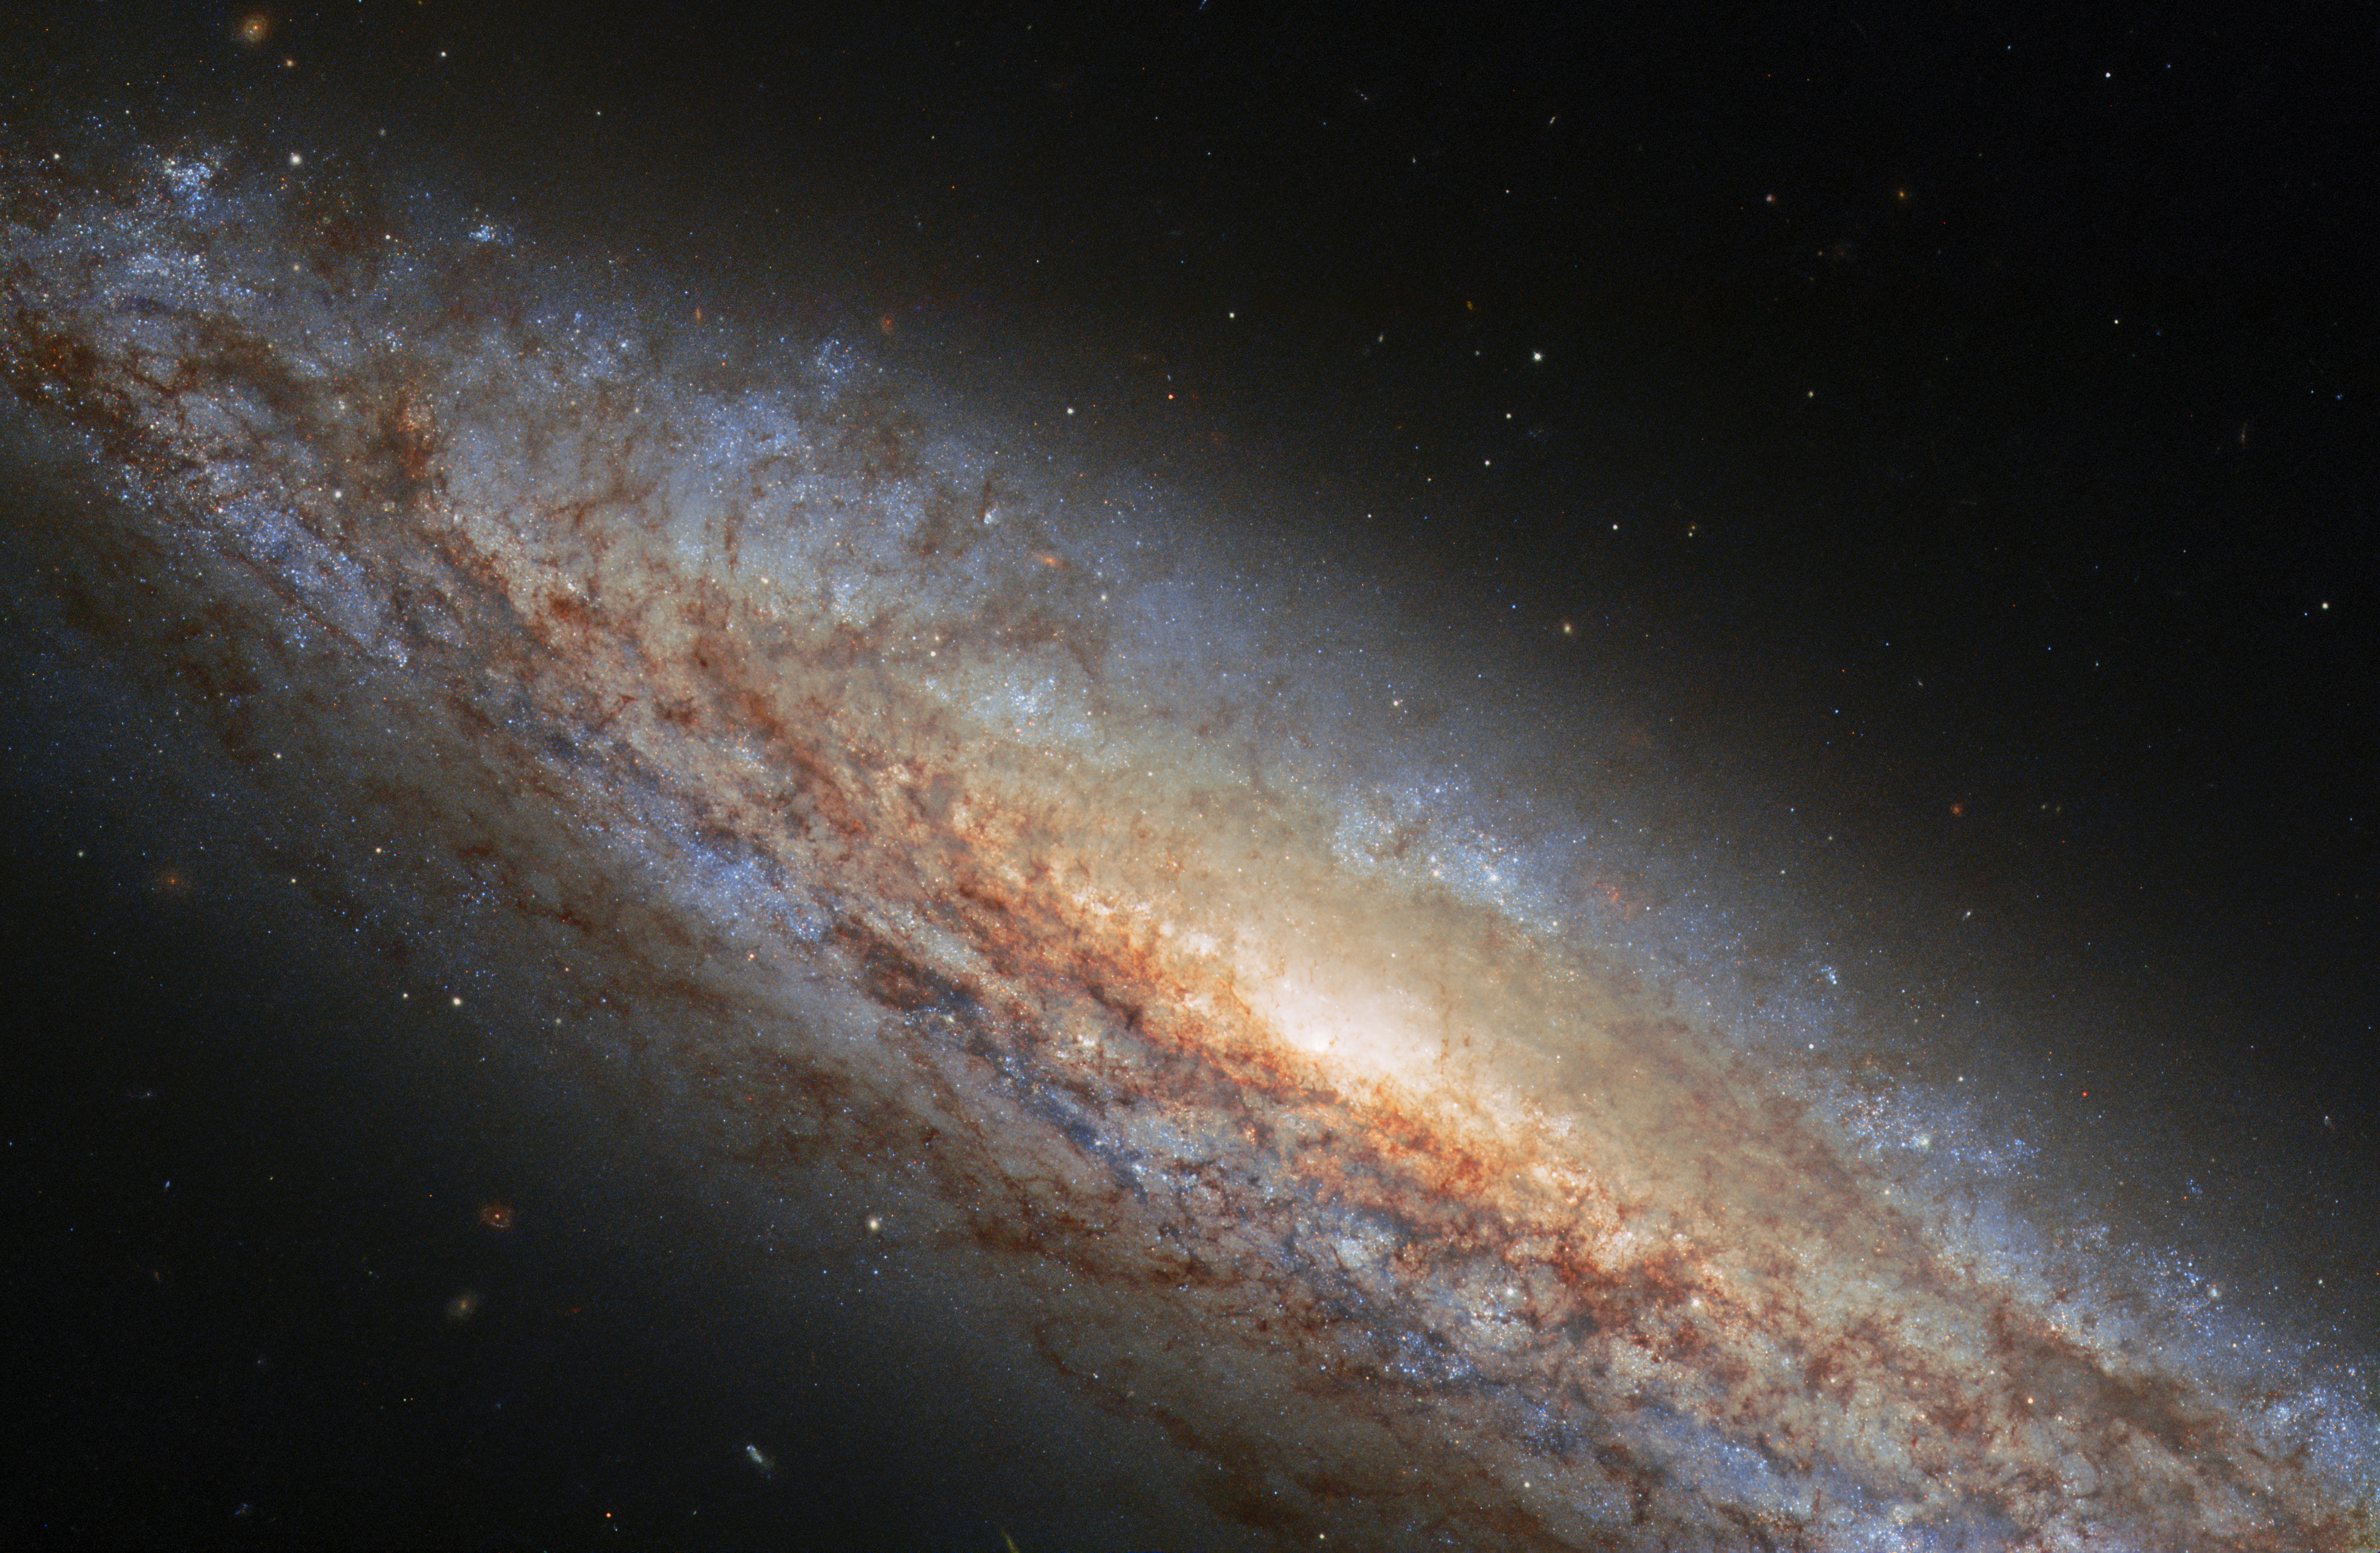

Invisible Galactic Gale

NGC 4666 takes centre stage in this image from the NASA/ESA Hubble Space Telescope. This majestic spiral galaxy lies about 80 million light-years away in the constellation Virgo, and is undergoing a particularly intense episode of star formation. Astronomers refer to galaxies which are forming stars anomalously quickly as starburst galaxies. NGC 4666’s starburst is thought to be due to gravitational interactions with its unruly neighbours — including the nearby galaxy NGC 4668 and a dwarf galaxy.

NGC 4666’s burst of star formation is driving an unusual form of extreme galactic weather known as a superwind — a gigantic transfer of gas from the bright central heart of the galaxy out into space. This superwind is the result of driving winds from short-lived massive stars formed during NGC 4666’s starburst as well as spectacularly energetic supernova explosions. Two such supernova explosions have been seen in NGC 4666 within the last decade — one in 2014 and the other in 2019. The star which led to the 2019 supernova was recently determined to be 19 times as massive as our Sun!

At peak, supernovae are often the brightest sources of light in their galaxies, shining so bright that they can be seen clear across the Universe. The 2014 supernova in NGC 4666 is still active in this image, but more than 900 days after it peaked, the supernova has faded from its former glory and looks like just one more star in this busy galaxy.

Though the torrent of superheated gas emanating from NGC 4666 is truly vast in scale — extending for tens of thousands of light-years — it is invisible in this image. The superwind’s extremely high temperature makes it stand out as a luminous plume in x-ray or radio observations, but it doesn’t show up at the visible wavelengths imaged by Hubble’s Wide Field Camera 3.

Credit: ESA/Hubble & NASA, O. Graur Acknowledgement: L. Shatz